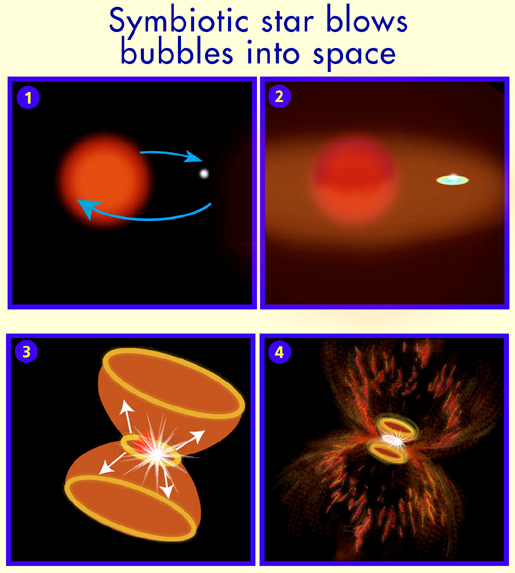

Symbiotic star blows bubbles into space

Panel 1: A pulsating red giant star and a compact, hot white dwarf star orbit each other.

Panel 2: The red giant sheds much of its outer layers in a stellar wind. The white dwarf helps concentrate the wind along a thin equatorial plane. The white dwarf accretes some of this escaping gas forming a disk around the itself.

Credit: NASA & ESA